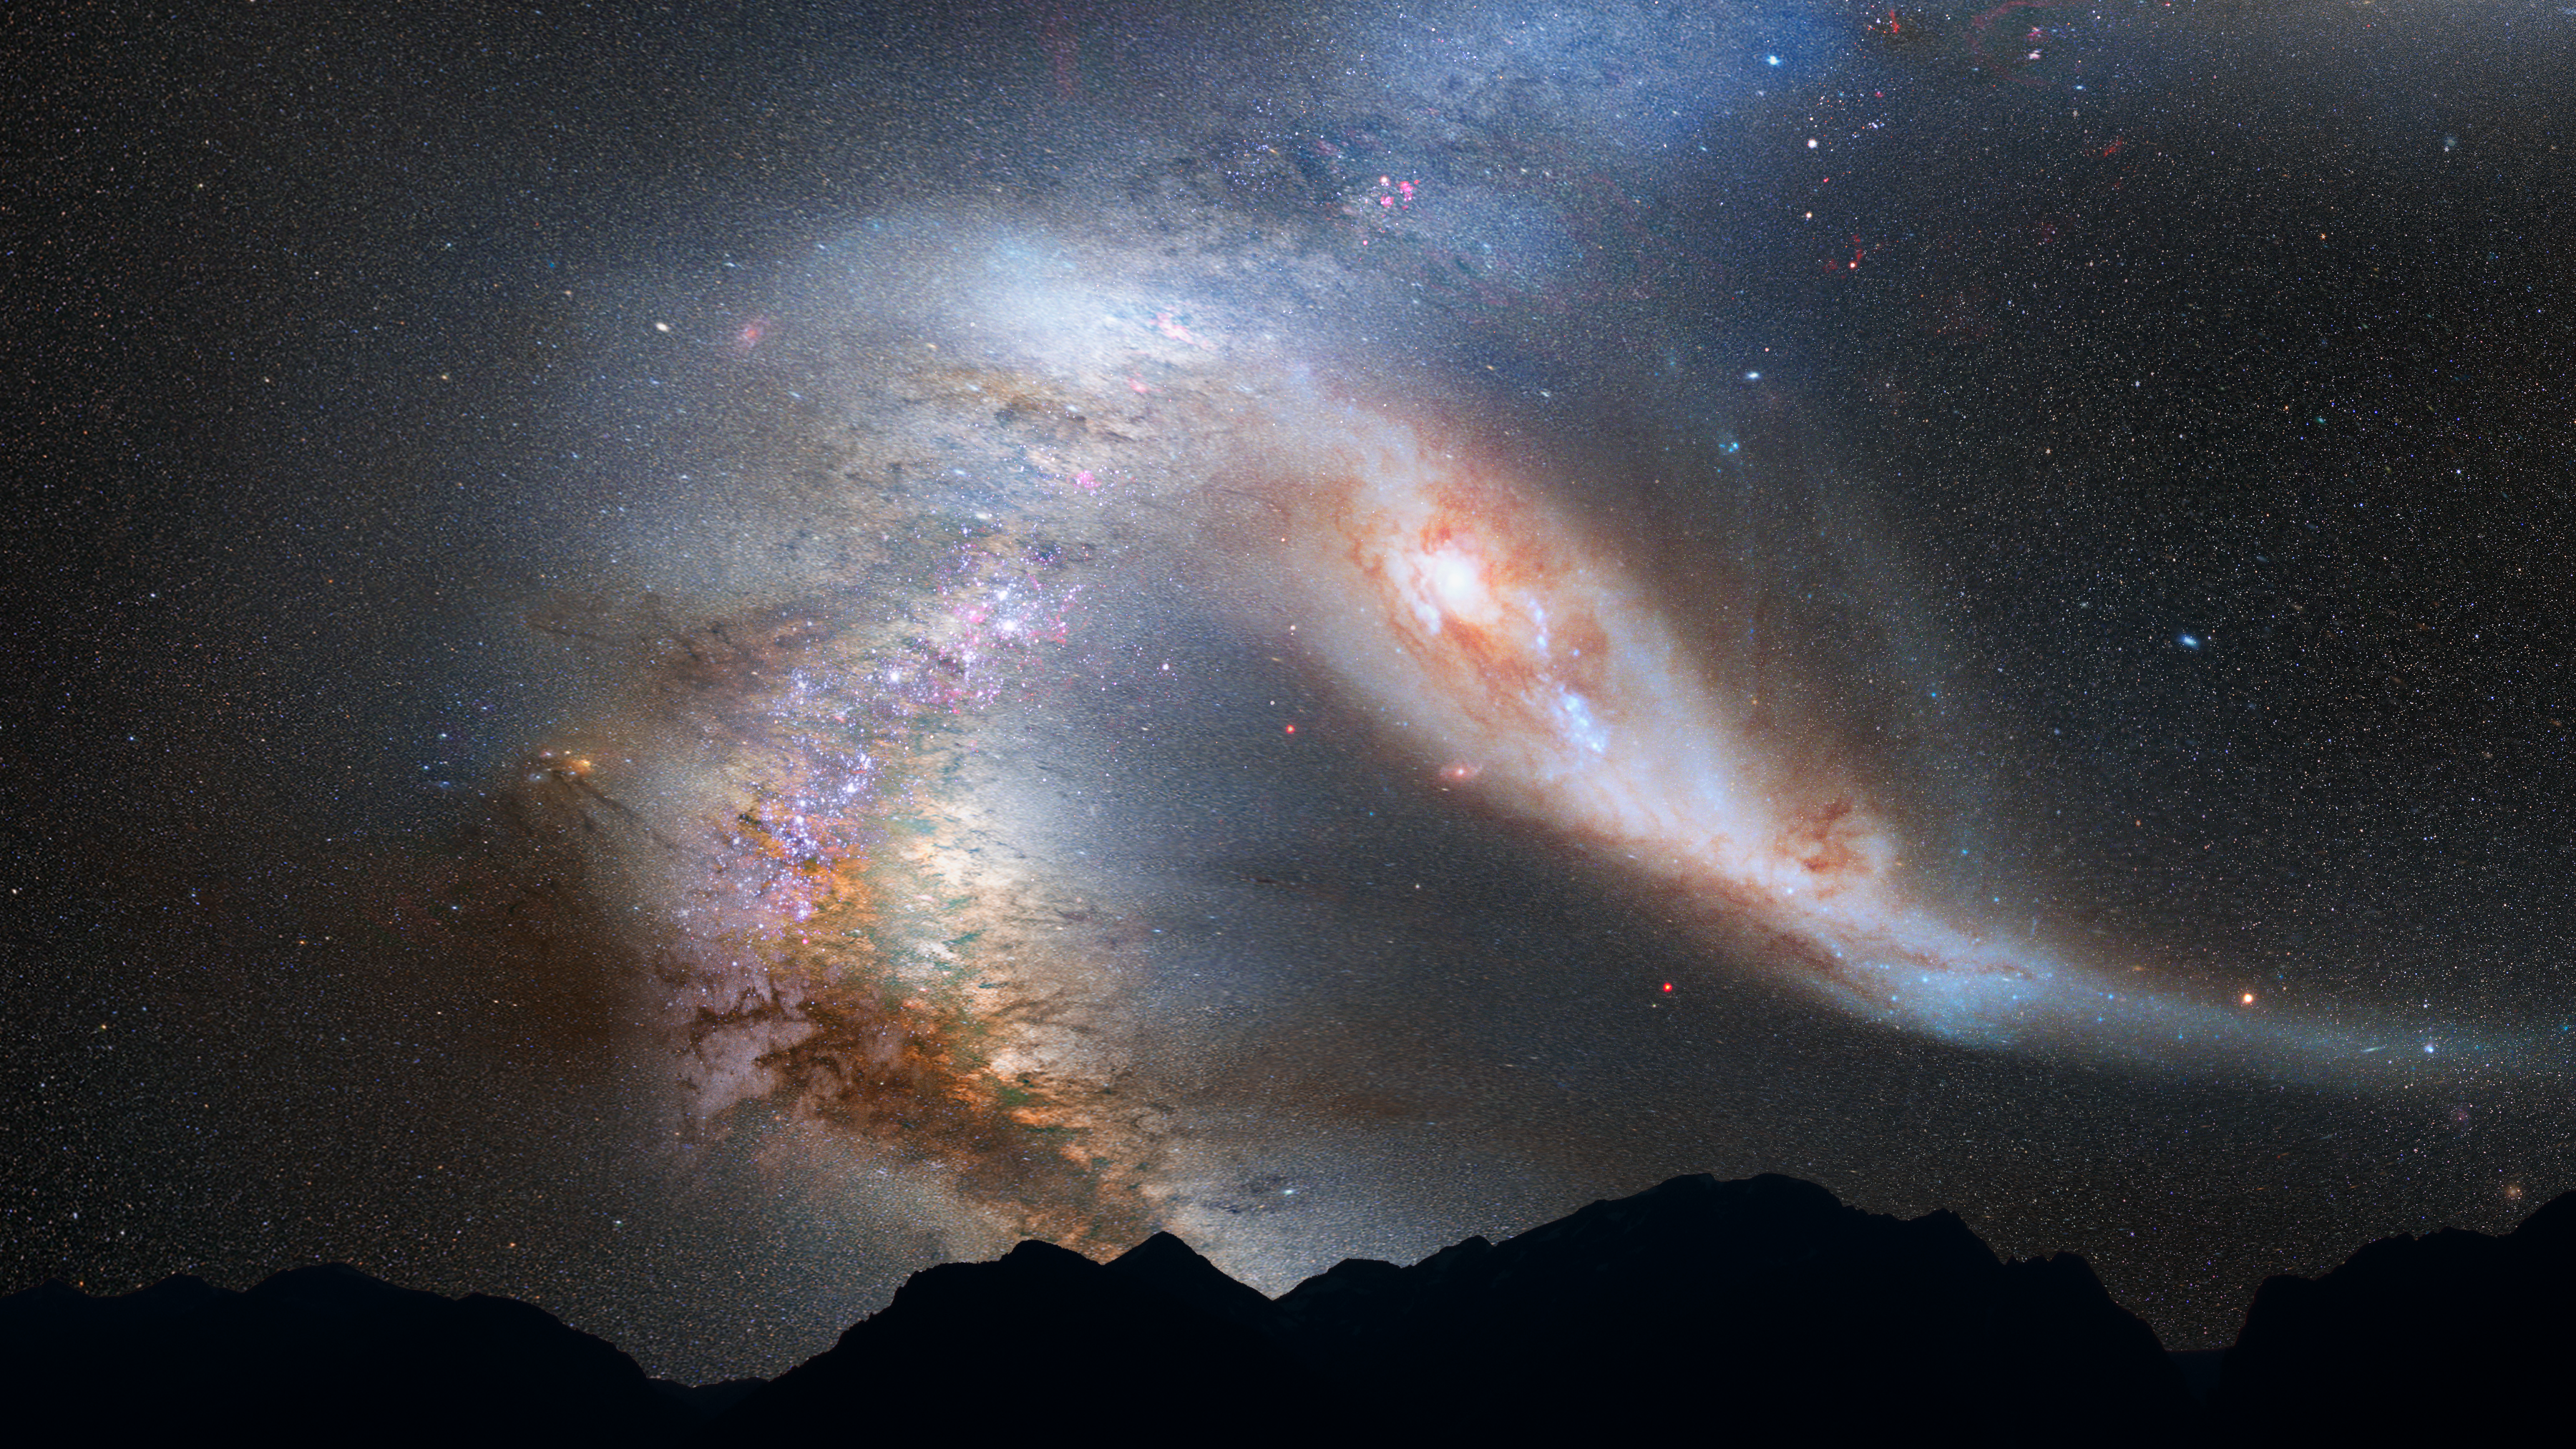

Nighttime Sky View of Future Galaxy Merger: 4 Billion Years

After its first close pass, Andromeda is tidally stretched out. The Milky Way, too, becomes warped.

Credit: NASA, ESA, Z. Levay and R. van der Marel (STScI), T. Hallas, and A. Mellinger